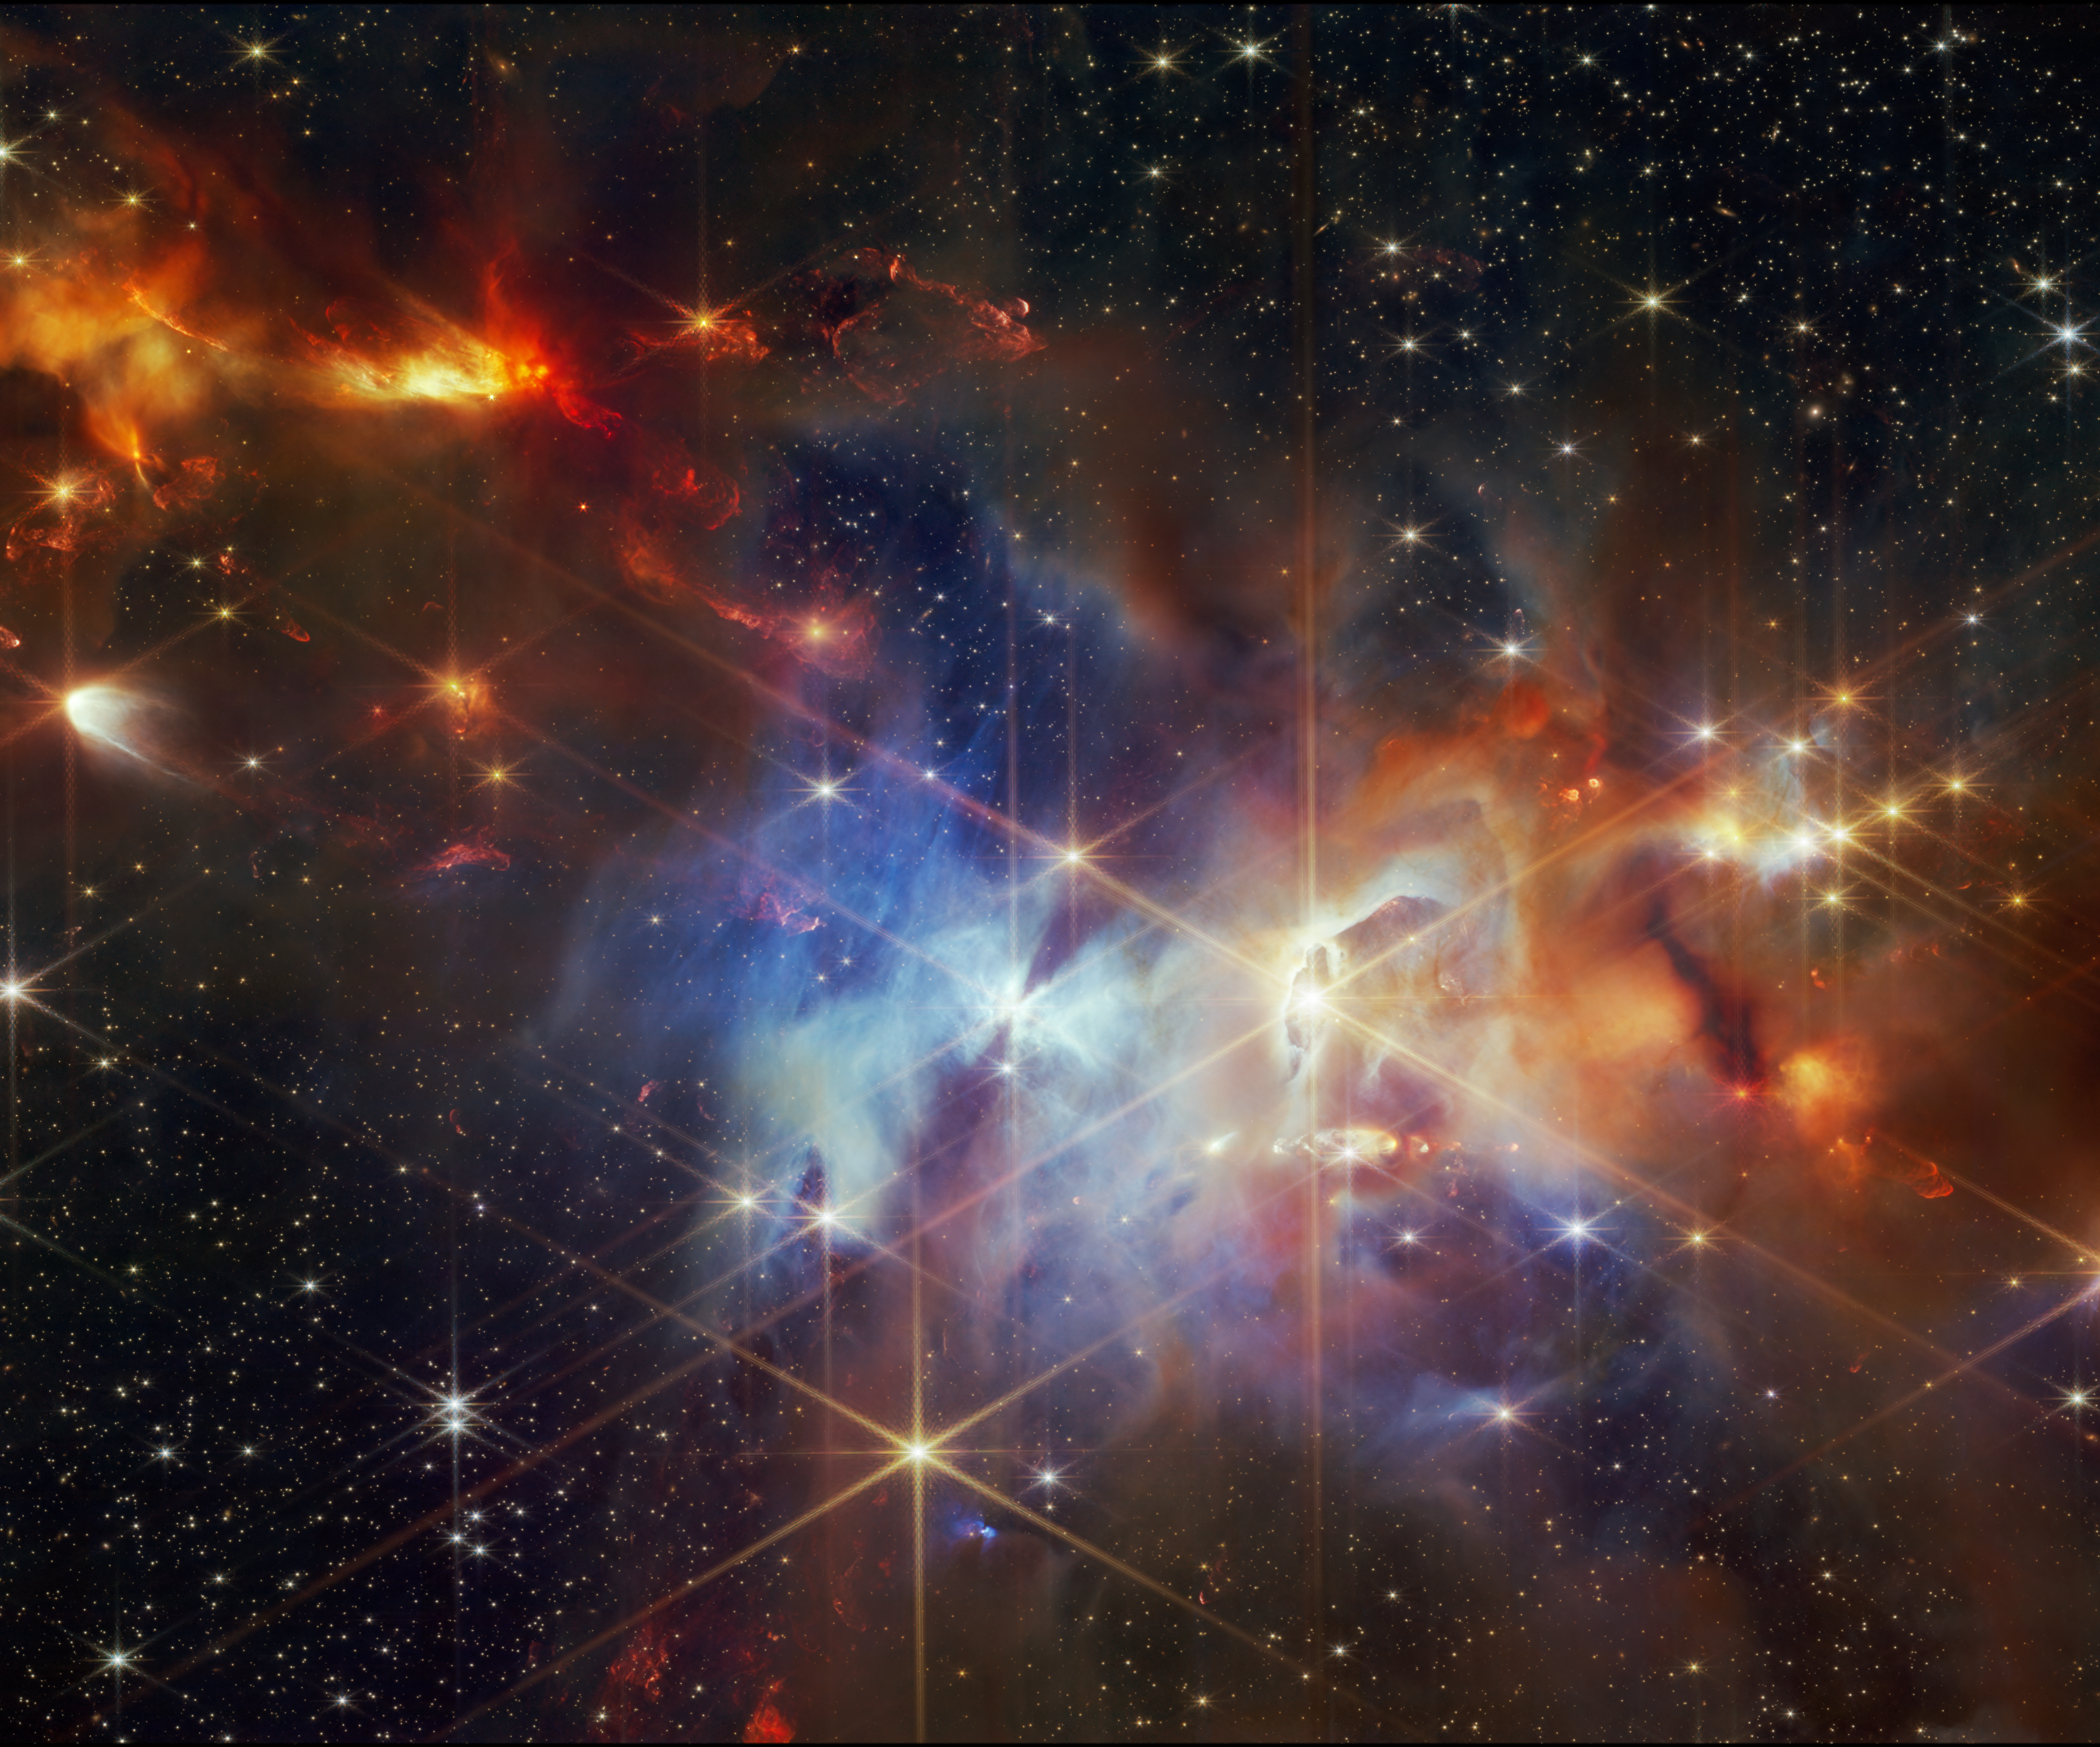

Serpens Nebula centre crop (NIRCam image)

This image shows the centre of the Serpens Nebula as seen by the NASA/ESA/CSA James Webb Space Telescope’s Near-InfraRed Camera (NIRCam).

The Serpens Nebula, located 1300 light-years from Earth, is home to a particularly dense cluster of newly forming stars (about 100 000 years old), some of which will eventually grow to the mass of our Sun. Webb’s image of this nebula revealed a grouping of aligned protostellar outflows (seen in the top left). These jets are identified by bright clumpy streaks that appear red, which are shock waves caused when the jet hits the surrounding gas and dust.

Throughout this image filaments and wisps of different hues represent reflected starlight from still-forming protostars within the cloud. In some areas, there is dust in front of that reflection, which appears here in an orange, diffuse shade.

Credit: NASA, ESA, CSA, STScI, K. Pontoppidan (NASA’s Jet Propulsion Laboratory), J. Green (Space Telescope Science Institute)